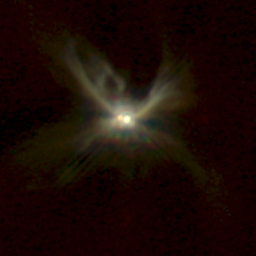

NICMOS Peers Through Dust to Reveal Young Stellar Disks. A View of CoKu Tau/1

This image shows a newborn binary star system, CoKu Tau/1, lying at the center of four 'wings' of light extending as much as 75 billion miles (about 120 billion kilometres) from the pair. The 'wings' outline the edges of a region in the stars' dusty surroundings, which have been cleared by outflowing gas. A thin, dark lane extends to the left and to right of the binary, suggesting that a disk or ring of dusty material encircles the two young stars.

Credit: D. Padgett (IPAC/Caltech), W. Brandner (IPAC), K. Stapelfeldt (JPL) and NASA/ESA